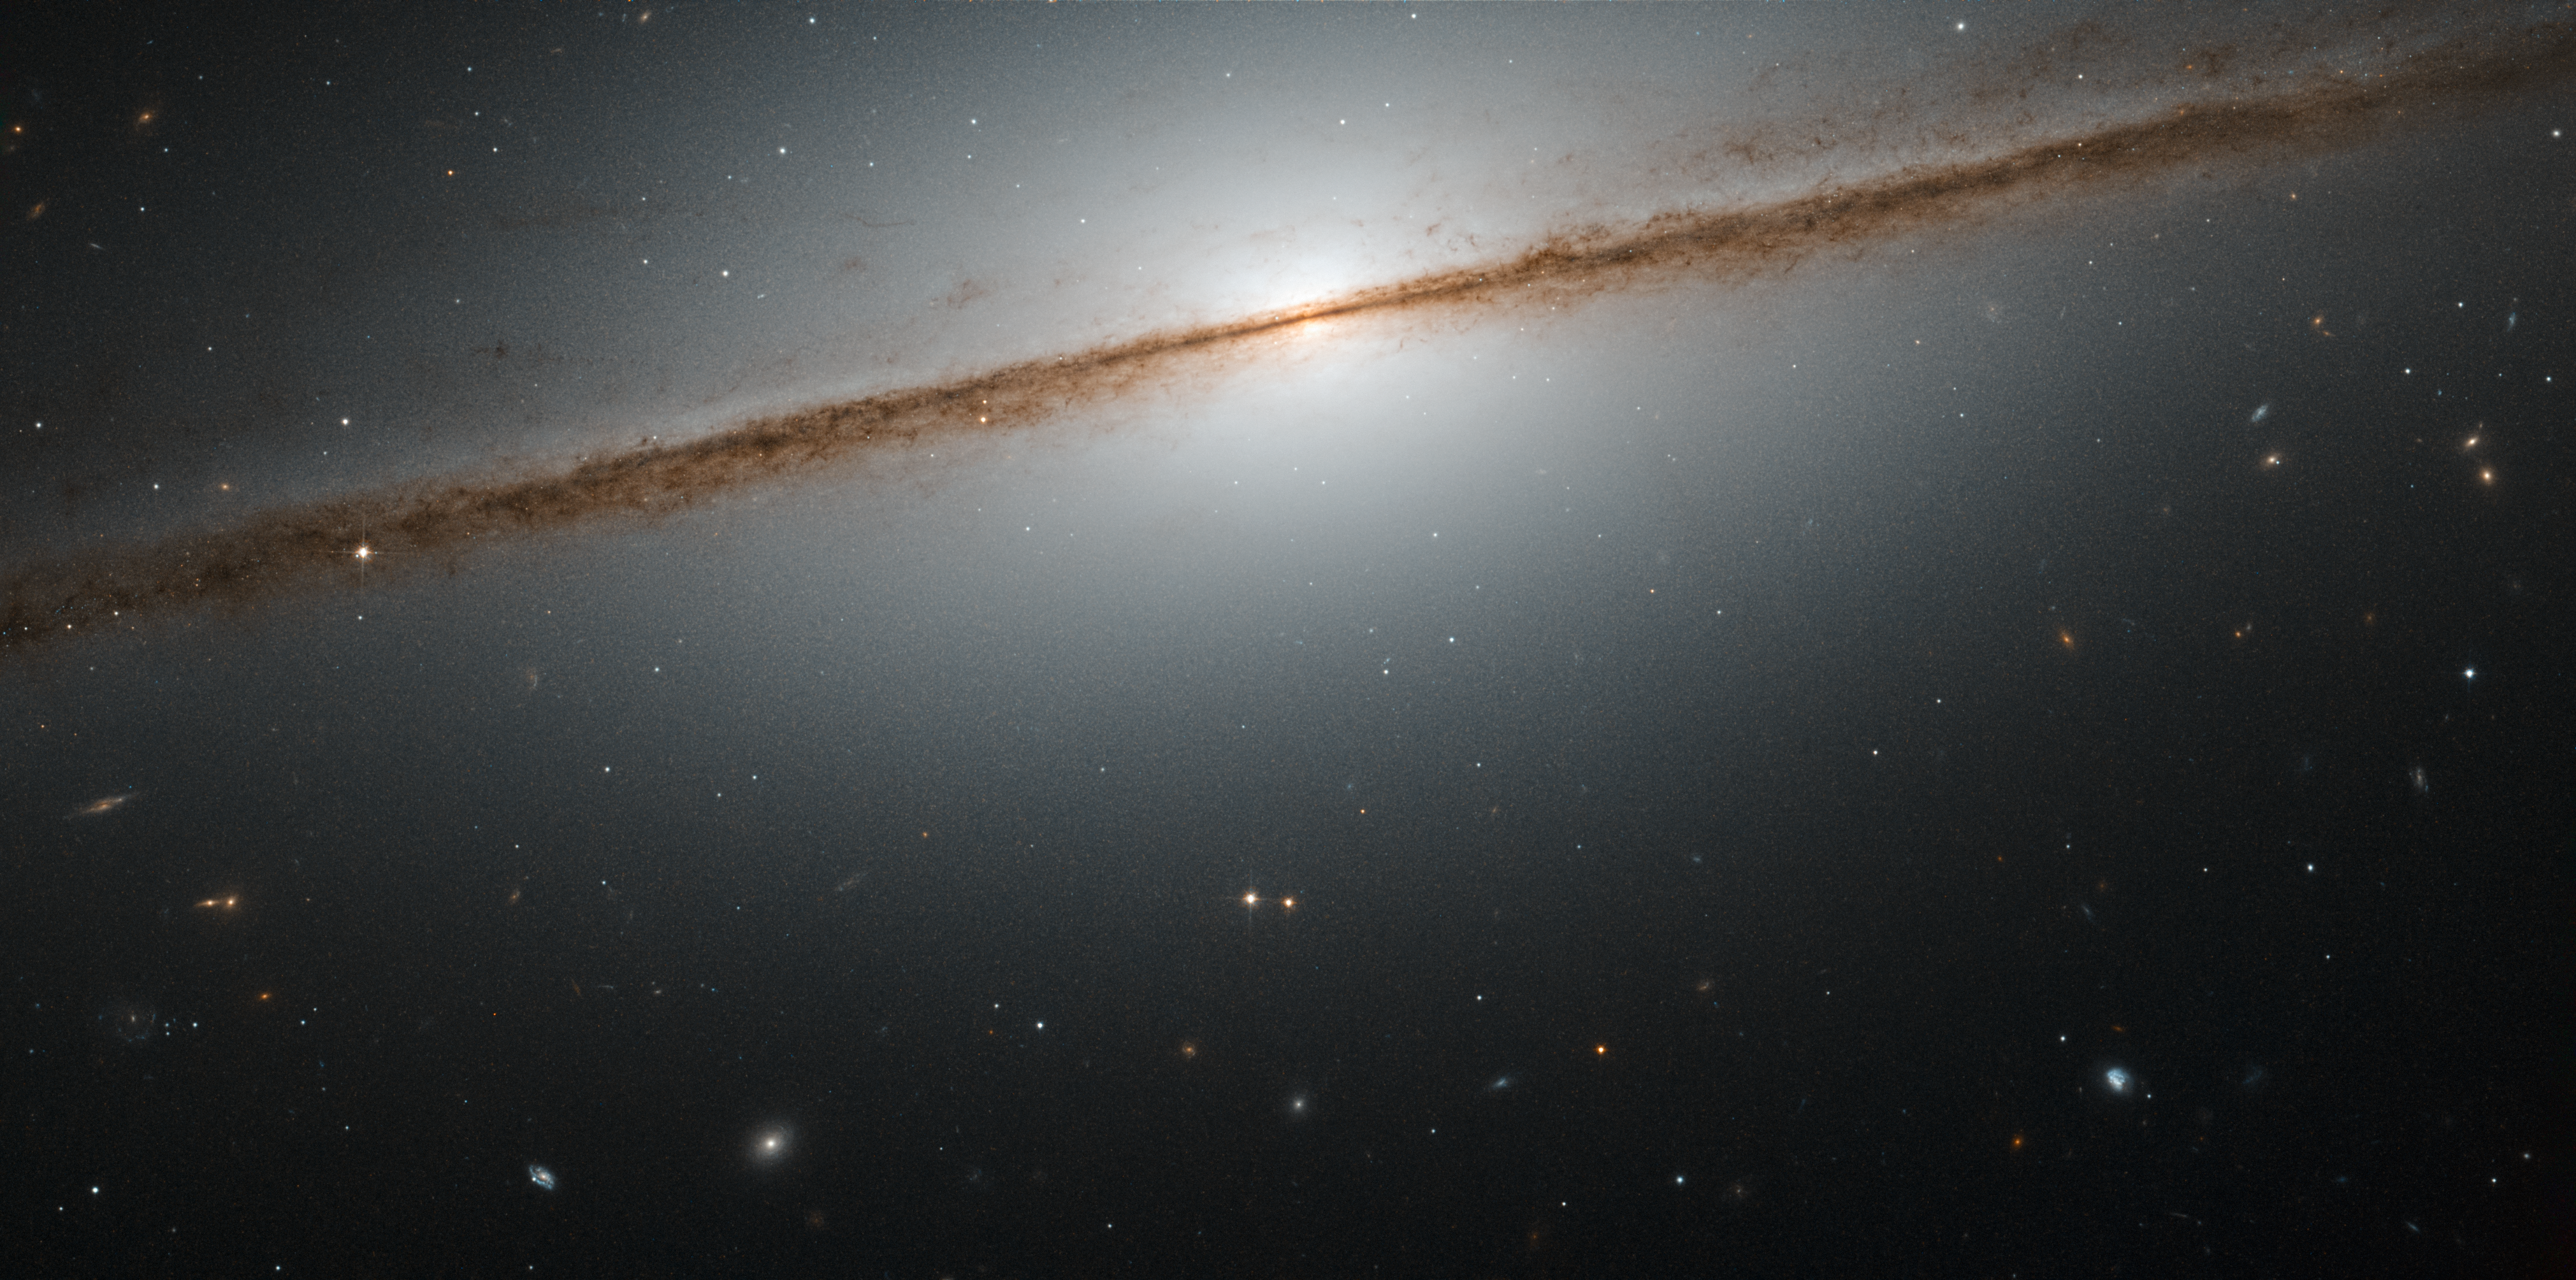

Dancing on the edge

Galaxies can take many shapes and be oriented any way relative to us in the sky. This can make it hard to figure out their actual morphology, as a galaxy can look very different from different viewpoints. A special case is when we are lucky enough to observe a spiral galaxy directly from its edge, providing us with a spectacular view like the one seen in this picture of the week.

This is NGC 7814, also known as the “Little Sombrero”. Its larger namesake the Sombrero Galaxy is another stunning example of an edge-on galaxy — in fact, the “Little Sombrero” is about the same size as its bright namesake at about 60 000 light-years across, but as it lies further away, it appears smaller in the sky.

NGC 7814 has a bright central bulge and a bright halo of glowing gas extending outwards into space. The dusty spiral arms appear as dark streaks. they consist of dusty material that absorbs and blocks light from the galactic centre behind it. The field of view of this NASA/ESA Hubble Space Telescope image would be very impressive even without NGC 7814 in front; nearly all the objects seen in this image are galaxies as well.

A version of this image was entered into the Hubble’s Hidden Treasures image processing competition by contestant Josh Barrington.

Credit: ESA/Hubble & NASA Acknowledgement: Josh Barrington